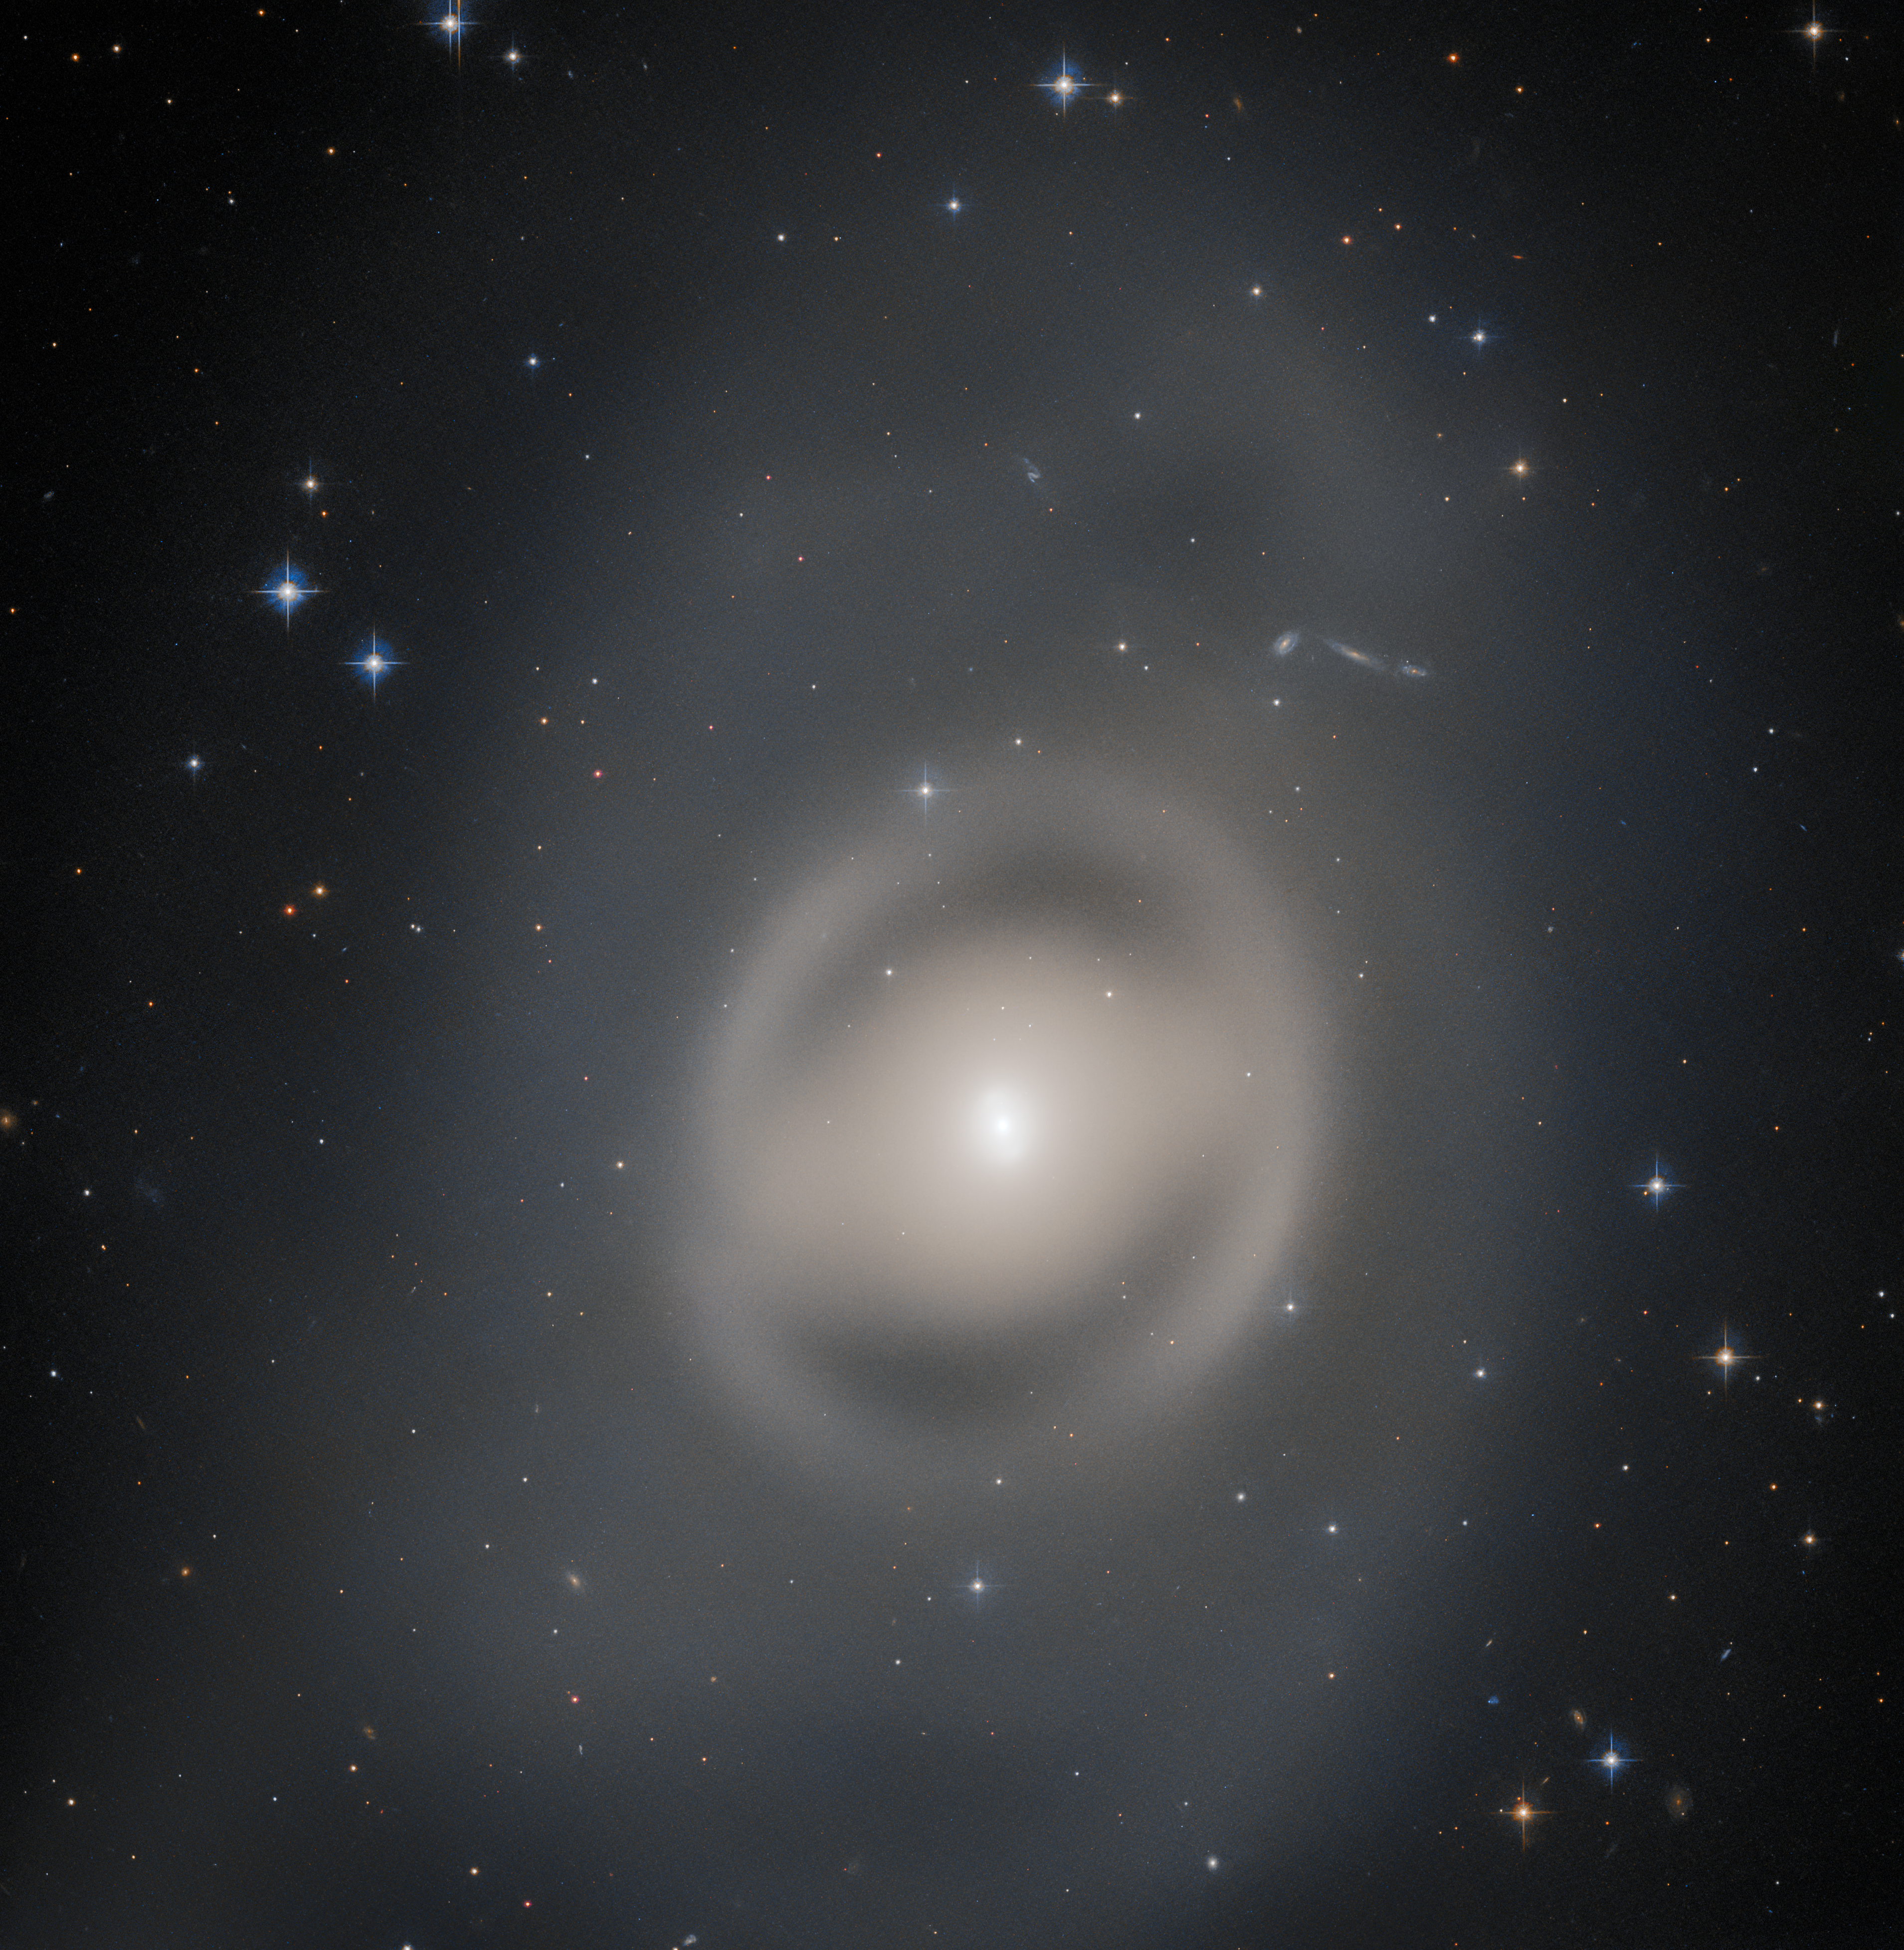

Portrait of a Ghostly Galactic Peacock

The lenticular galaxy NGC 6684 bathes this image from the NASA/ESA Hubble Space Telescope in a pale light. Captured with Hubble’s Advanced Camera for Surveys, this lenticular galaxy is around 44 million light-years from Earth in the constellation Pavo. Pavo — whose name is Latin for peacock — is a constellation in the southern sky and one of four constellations collectively known as the Southern Birds.

Lenticular galaxies like NGC 6684 (lenticular means lens-shaped) possess a large disc but lack the prominent spiral arms of galaxies like the Andromeda Galaxy. This leaves them somewhere between elliptical galaxies and spiral galaxies, and lends these galaxies a diffuse, ghostly experience. NGC 6684 also lacks the dark dust lanes that thread through other galaxies, adding to its spectral, insubstantial appearance.

The data in this image were captured during a census of the nearby Universe entitled Every Known Nearby Galaxy which aims to observe all galaxies within 10 megaparsecs (32.6 million light-years) that the telescope has not already visited. Before this programme began Hubble had observed roughly 75% of these nearby galaxies, and completing this census will reveal insights into the stars making up a wide variety of galaxies, in a wide variety of environments.

Credit: ESA/Hubble & NASA, R. Tully